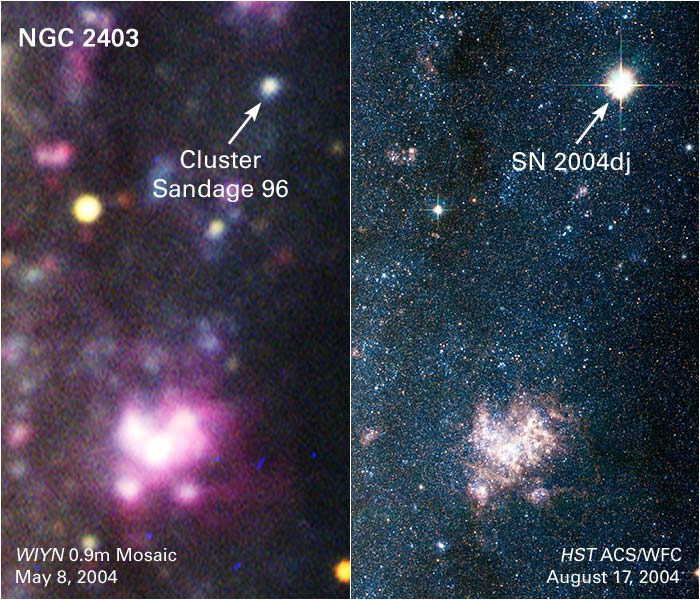

Galaxy NGC 2403: Before and After Supernova 2004dj Outburst

The image at left represents a small region of NGC 2403, a galaxy located 11 million light-years from Earth. The photo was taken two months before a massive star exploded. The image pinpoints the location of the stellar blast, known as supernova 2004dj, within a cluster of massive, generally blue (but some red) stars called Sandage 96. The cluster's total mass is estimated at about 24,000 times the mass of the Sun. The stars in this cluster are so far away that their light blends together, appearing as the light of a single star. The yellow object below and to the left of the cluster is a foreground star in our Milky Way Galaxy. The pink blob at bottom, center is a star-birth region. This image was taken May 8, 2004, with the WIYN 0.9-meter mosaic camera at Kitt Peak National Observatory in Arizona.

The image at right pinpoints the supernova blast. The photo was taken on Aug. 17, 2004, with the Hubble Space Telescope's Advanced Camera for Surveys. The light from this outburst outshines every star in the massive cluster. Similar blue clusters of stars can be seen throughout the image. The bluish-pink blob towards the bottom of the image is a large star-birth region.

Credit for ground-based image: WIYN/NOAO/AURA/NSF, T. Rector (University of Alaska, Anchorage), Z. Levay and L. Frattare (STScI). Credit for Hubble image: NASA, ESA, A.V. Filippenko (University of California, Berkeley), P. Challis (Harvard-Smithsonian Center for Astrophysics), et al.